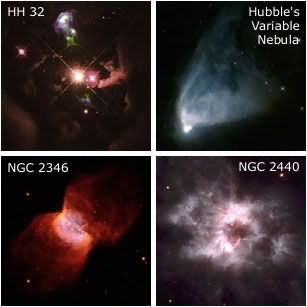

Hubble Heritage Project's First Anniversary

To mark the first anniversary of the Hubble Heritage Project, we present four NASA/ESA Hubble Space Telescope images of nebulae surrounding stars in our own Milky Way galaxy. Two of these Wide Field Planetary Camera 2 images (Herbig Haro 32 and Hubble's Variable Nebula) show interstellar gas and dust around young stars at the beginning of their lives, and two more (NGC 2346 and NGC 2440) show gas ejected from old stars that are nearing the end of theirs. Remarkably, in spite of the completely different evolutionary stages, the nebulae have more striking features in common, including evidence of diametrically opposed gas ejections from both the young and old stars.

Credit: NASA/ESA and The Hubble Heritage Team (AURA/STScI).